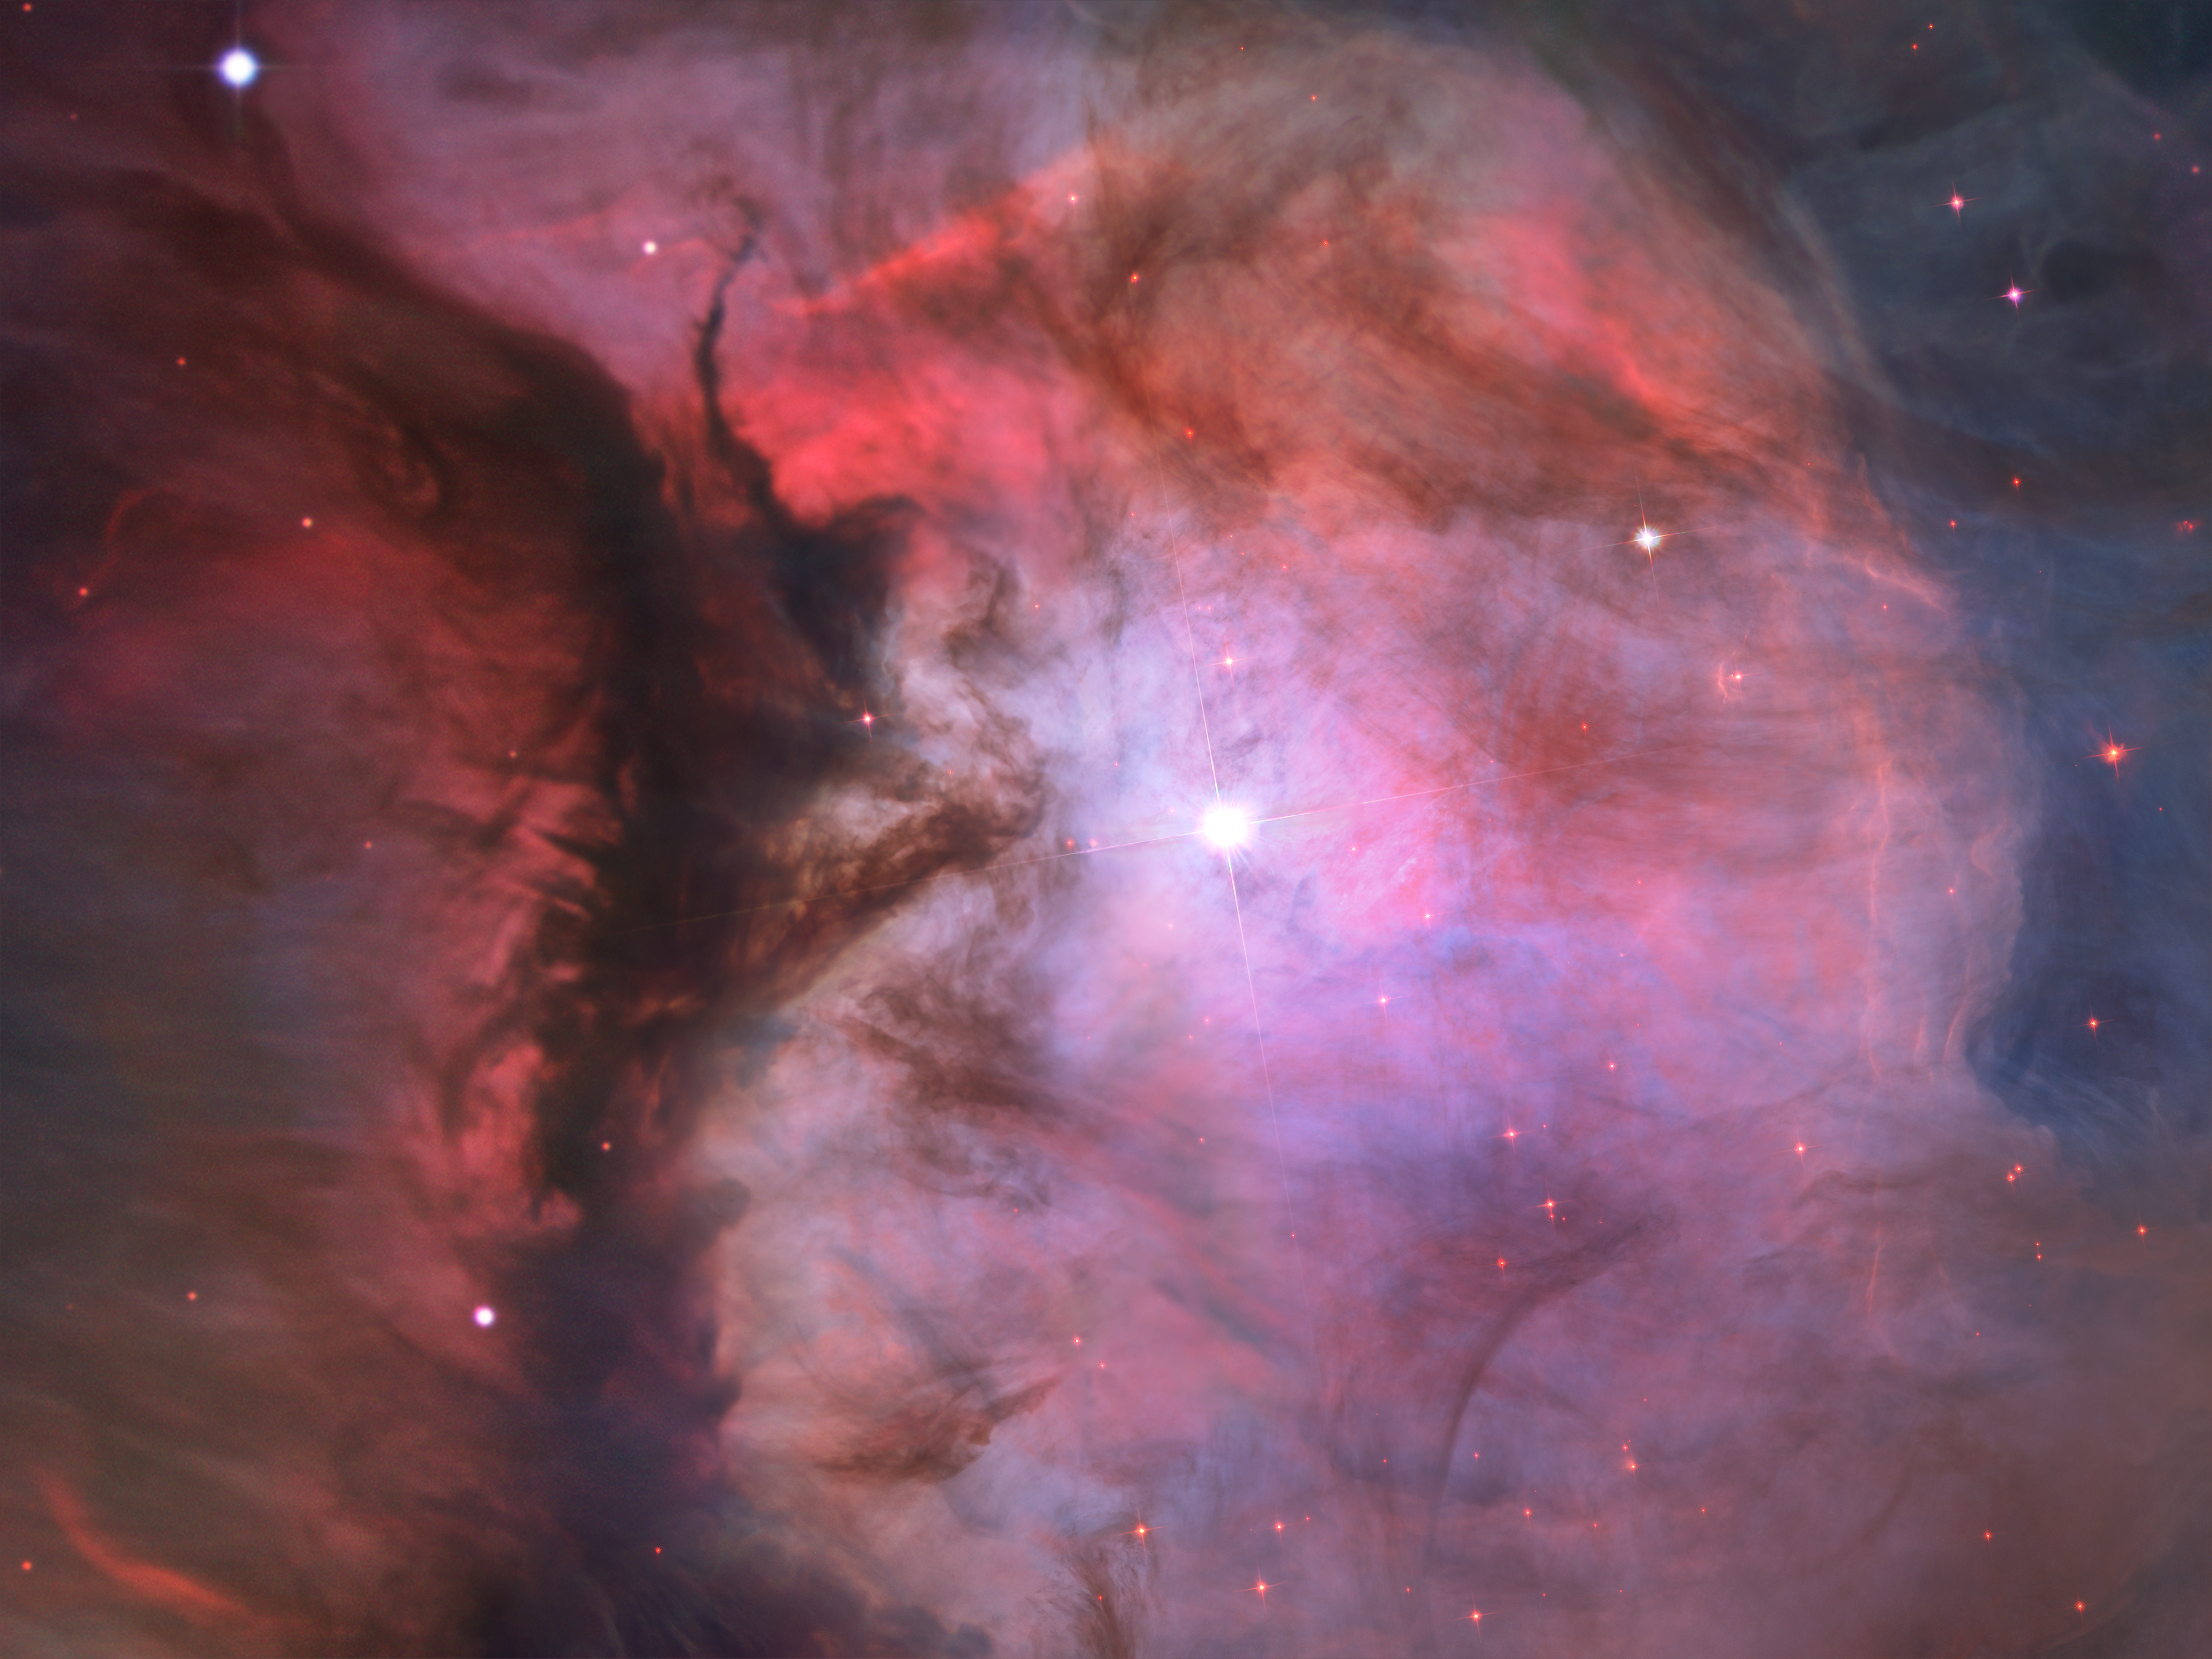

Orion in miniature

A massive star is illuminating this small region, called M43, and sculpting the landscape of dust and gas. Astronomers call the area a miniature Orion Nebula because of its small size and the single star that is shaping it. The Orion Nebula itself is much larger and has four hefty stars that are carving the dust-and-gas terrain.

Credit: NASA, ESA, M. Robberto ( Space Telescope Science Institute/ESA) and the Hubble Space Telescope Orion Treasury Project Team